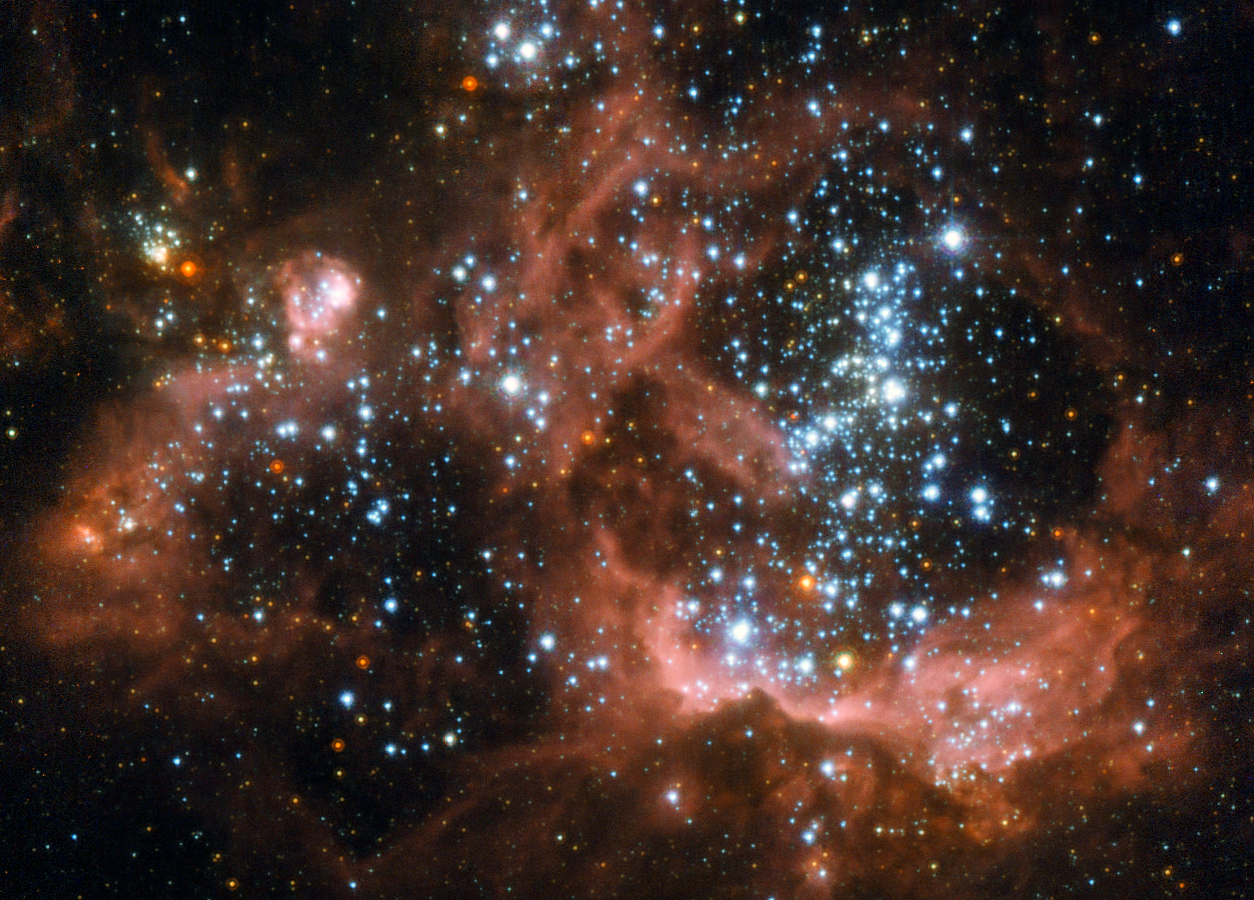

Young stars biting the cloud that feeds them

A billowing cloud of hydrogen in the Triangulum galaxy (Messier 33), about 2.7 million light-years away from Earth, glows with the energy released by hundreds of young, bright stars. This NASA/ESA Hubble Spare Telescope image provides the sharpest view of NGC 604 so far obtained.

Some 1500 light-years across, this is one of the largest, brightest concentrations of ionised hydrogen (H II) in our local group of galaxies, and is a major centre of star formation.

The gas in NGC 604, around nine tenths of it hydrogen, is gradually collapsing under the force of gravity to create new stars. Once these stars have formed, the vigorous ultraviolet radiation they emit excites the remaining gas in the cloud, making it glow a distinct shade of red. This colour is typical not only of NGC 604 but of other H II regions too. Although it is part of Messier 33 this object is so bright and prominent that it was given its own NGC number.

The fierce ultraviolet radiation released by the stars that give these hydrogen clouds their distinctive glow is also the cause of their uneven appearance and eventual disappearance. The radiation and winds blowing from the surface of these stars gradually erode the cloud they formed from, causing the gases to slowly disperse. The complex structure of NGC 604, with irregular bubbles and wispy filament-like structures alongside denser, redder areas is due to the same forces that will eventually make the cloud disappear. The blister-like cavities show areas of stronger erosion of the cloud. While these areas appear dark in this photograph, they shine brightly at X-ray wavelengths.

This image was created from images taken using the High Resolution Channel of Hubble's Advanced Camera for Surveys. It is a composite of images taken through a total of seven different filters spanning a huge range of wavelengths — from 220 nm in the ultraviolet all the way up to the near infrared at one micron. The field of view is about 31 by 22 arcseconds.

Credit: ESA/Hubble and NASA